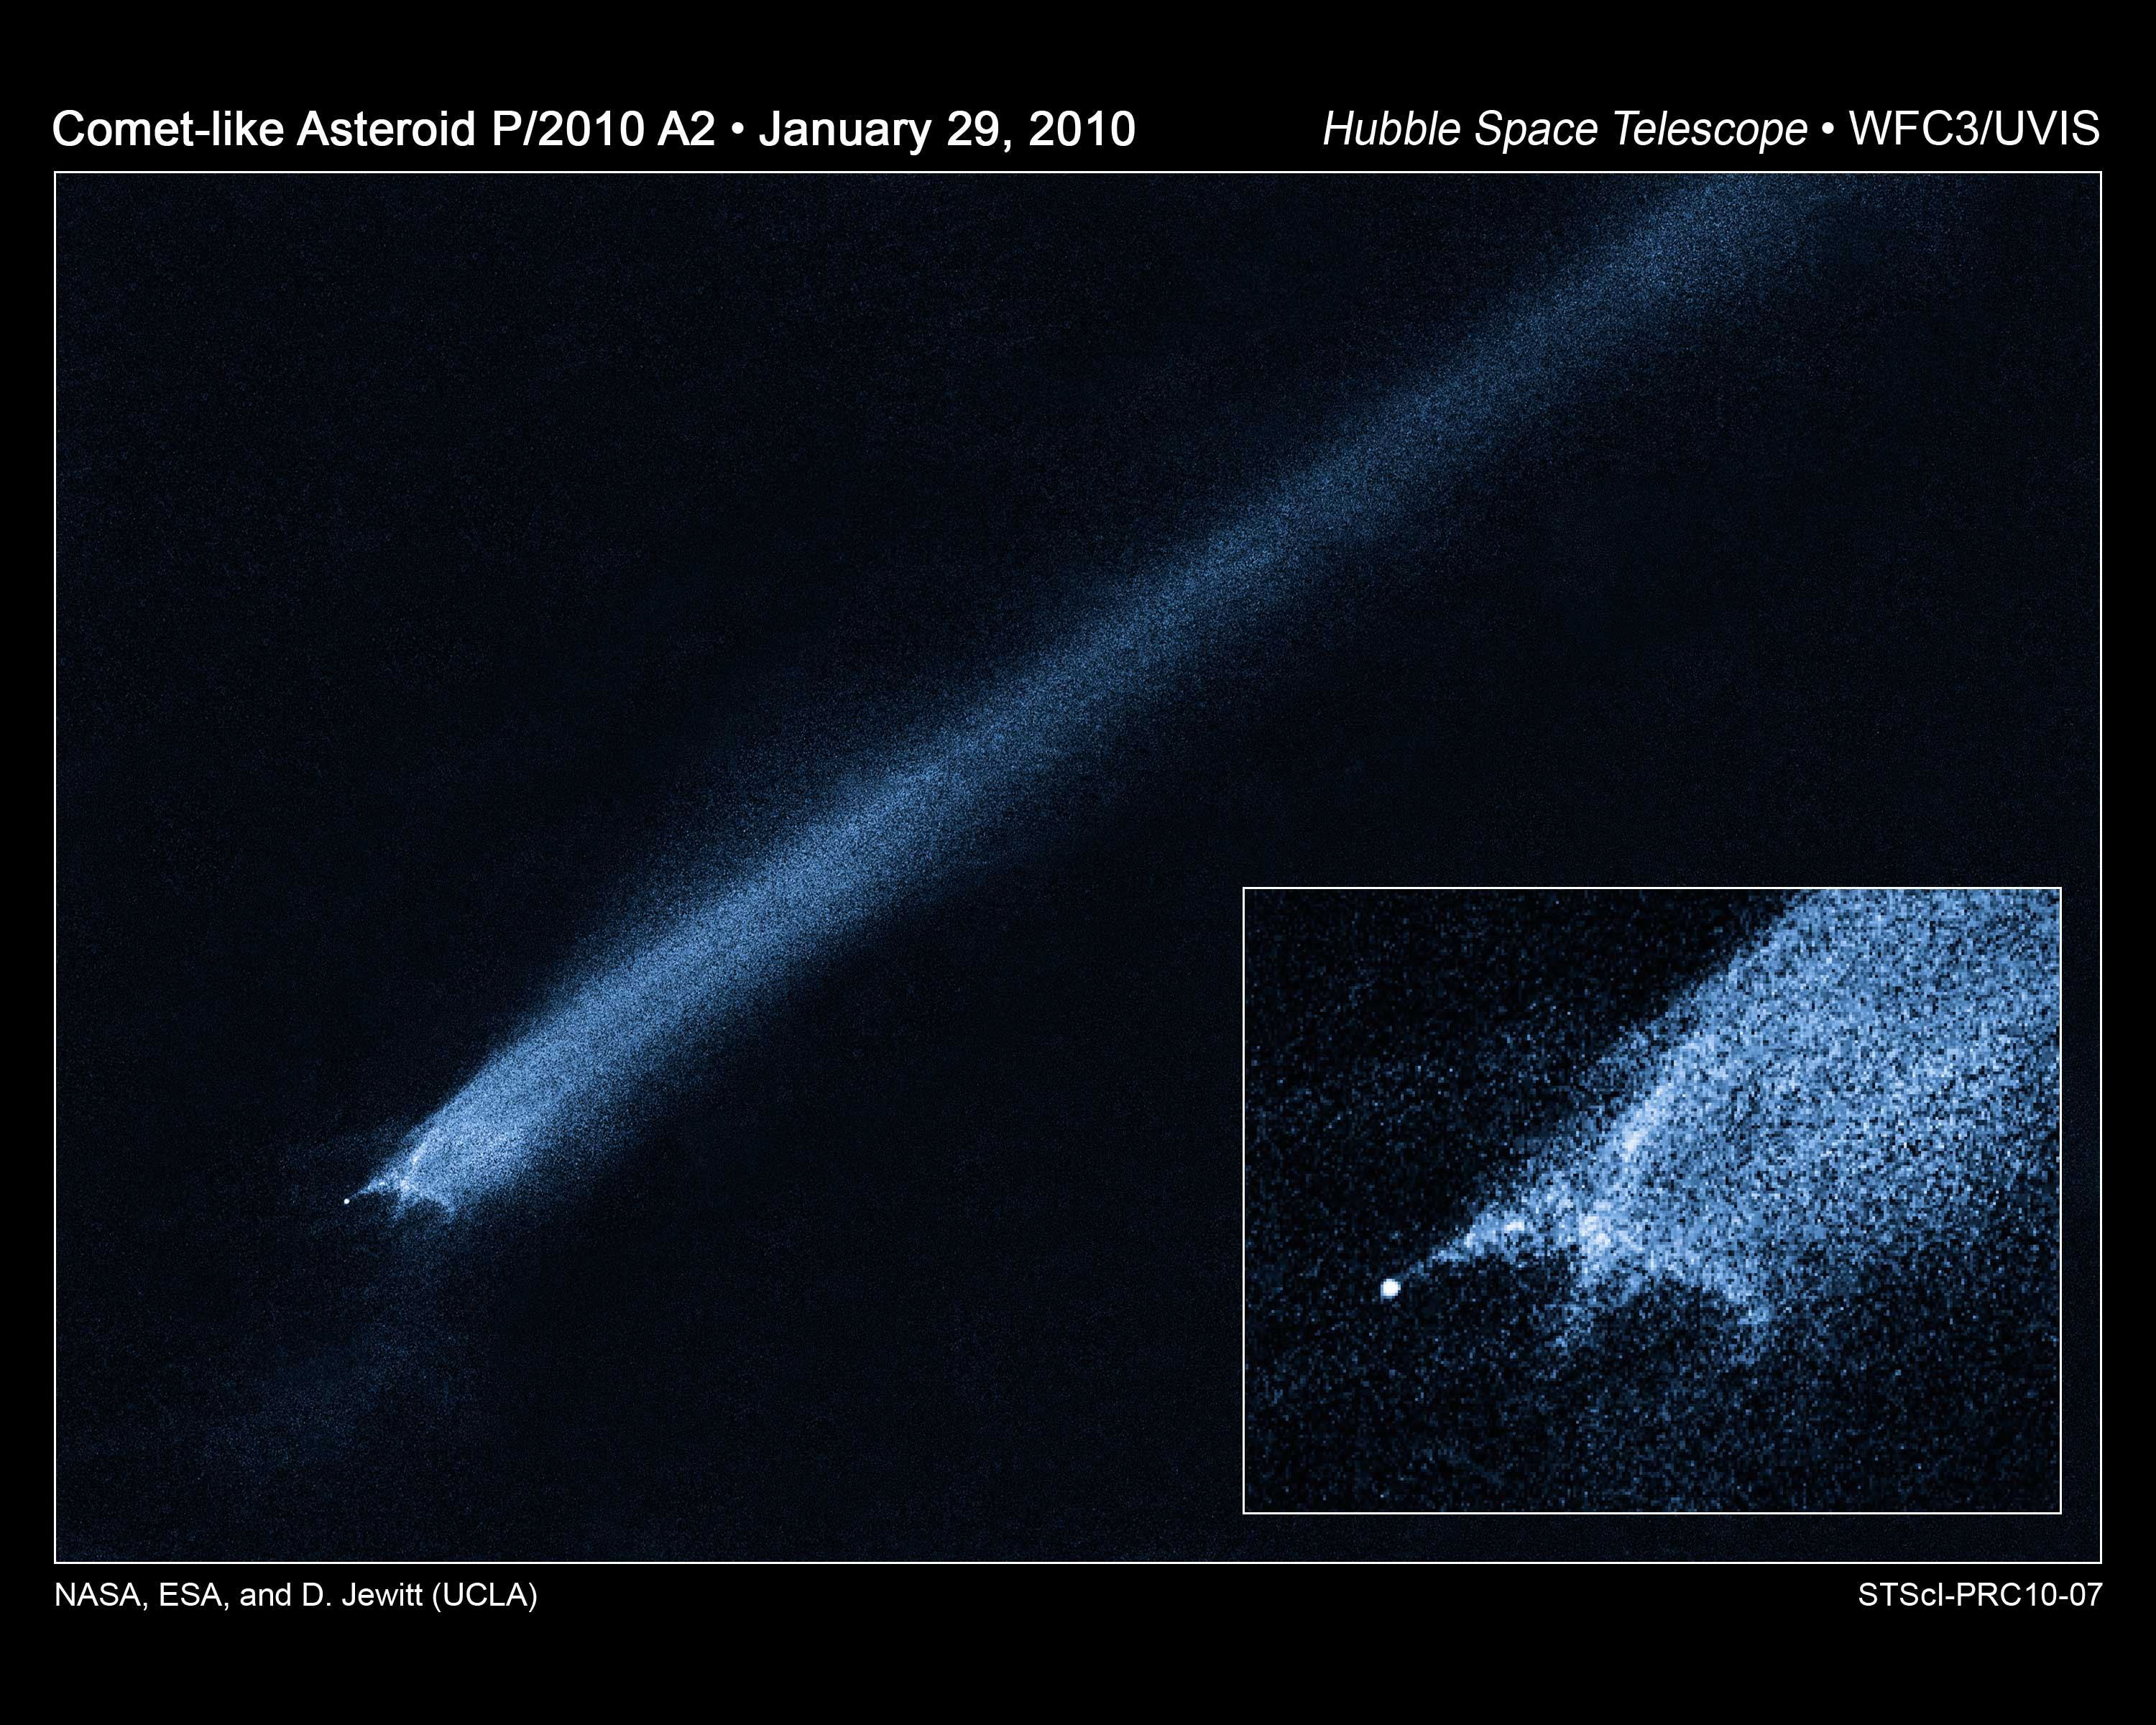

Hubble views of comet-like asteroid P/2010 A2

This is a NASA/ESA Hubble Space Telescope picture a comet-like object called P/2010 A2, which was first discovered by the LINEAR (Lincoln Near-Earth Asteroid Research program) sky survey on 6 January. The object appears so unusual in ground-based telescopic images that discretionary time on Hubble was used to take a close-up look. This picture, from the 29 January observation, shows a bizarre X-pattern of filamentary structures near the point-like nucleus of the object and trailing streamers of dust.

The inset picture shows a complex structure that suggests the object is not a comet but instead the product of a head-on collision between two asteroids traveling five times faster than a rifle bullet (5 kilometres per second). Astronomers have long thought that the asteroid belt is being ground down through collisions, but such a smashup has never before been seen.

The filaments are made of dust and gravel, presumably recently thrown out of the 140-metre-diameter nucleus. Some of the filaments are swept back by radiation pressure from sunlight to create straight dust streaks. Embedded in the filaments are co-moving blobs of dust that likely originate from tiny unseen parent bodies. An impact origin would also be consistent with the absence of gas in spectra recorded using ground-based telescopes.

At the time of the Hubble observations, the object was approximately 300 million km from the Sun and 140 million km from Earth. The Hubble images were recorded with the new Wide Field Camera 3 (WFC3). The image was taken in visible light. The colour in the image is not what the human eye would see. A blue colour map was added to bring out subtle details.

Credit: NASA, ESA and D. Jewitt (UCLA)